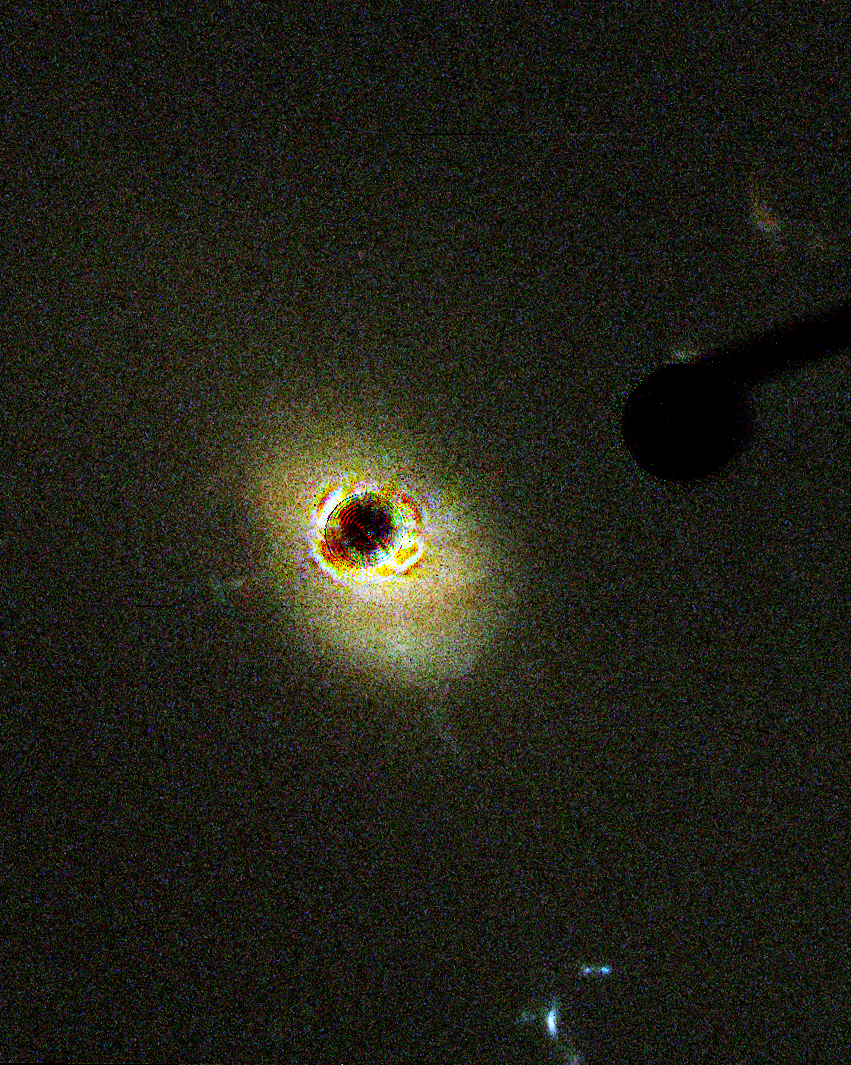

Quasar 3C 273

The Hubble Space Telescope's new Advanced Camera for Surveys (ACS) has provided the clearest view yet in visible light of the nearby quasar, 3C 273.

Credit: NASA, M. Clampin (STScI), H. Ford (JHU), G. Illingworth (UCO/Lick Observatory), J. Krist (STScI), D. Ardila (JHU), D. Golimowski (JHU), the ACS Science Team, J. Bahcall (IAS) and ESA